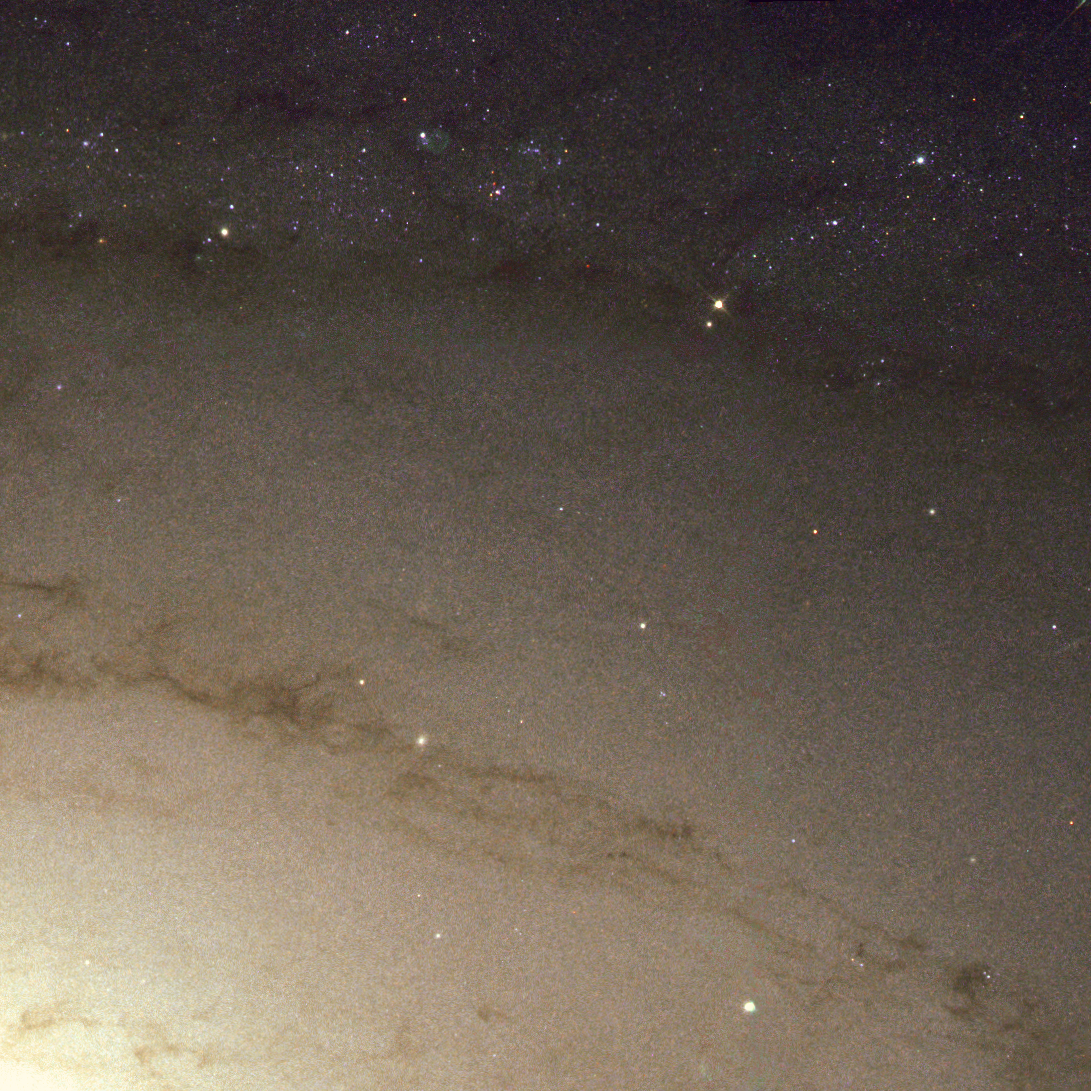

Messier 81 spiral arm (WFPC2 image) ˜

This NASA/ESA Hubble Space Telescope image shows a small portion of one of Messier 81's spiral arms. It extends about 0.03 x 0.03 degrees. The supernova companion is the bluish star in the upper right hand corner. Dust lanes in the spiral arms of the galaxy are seen, as well as many other stars and a few star forming nebulae.

The image is composed of four separate exposures from the ESO/ST-ECF Archive through a blue filter, a green filter, a red filter and a near-infrared filter. The image was taken with Hubble's Wide Field and Planetary Camera 2.

Credit: ESA and Justyn R. Maund (University of Cambridge) Acknowledgement: Bob Kirshner (Harvard University, USA)